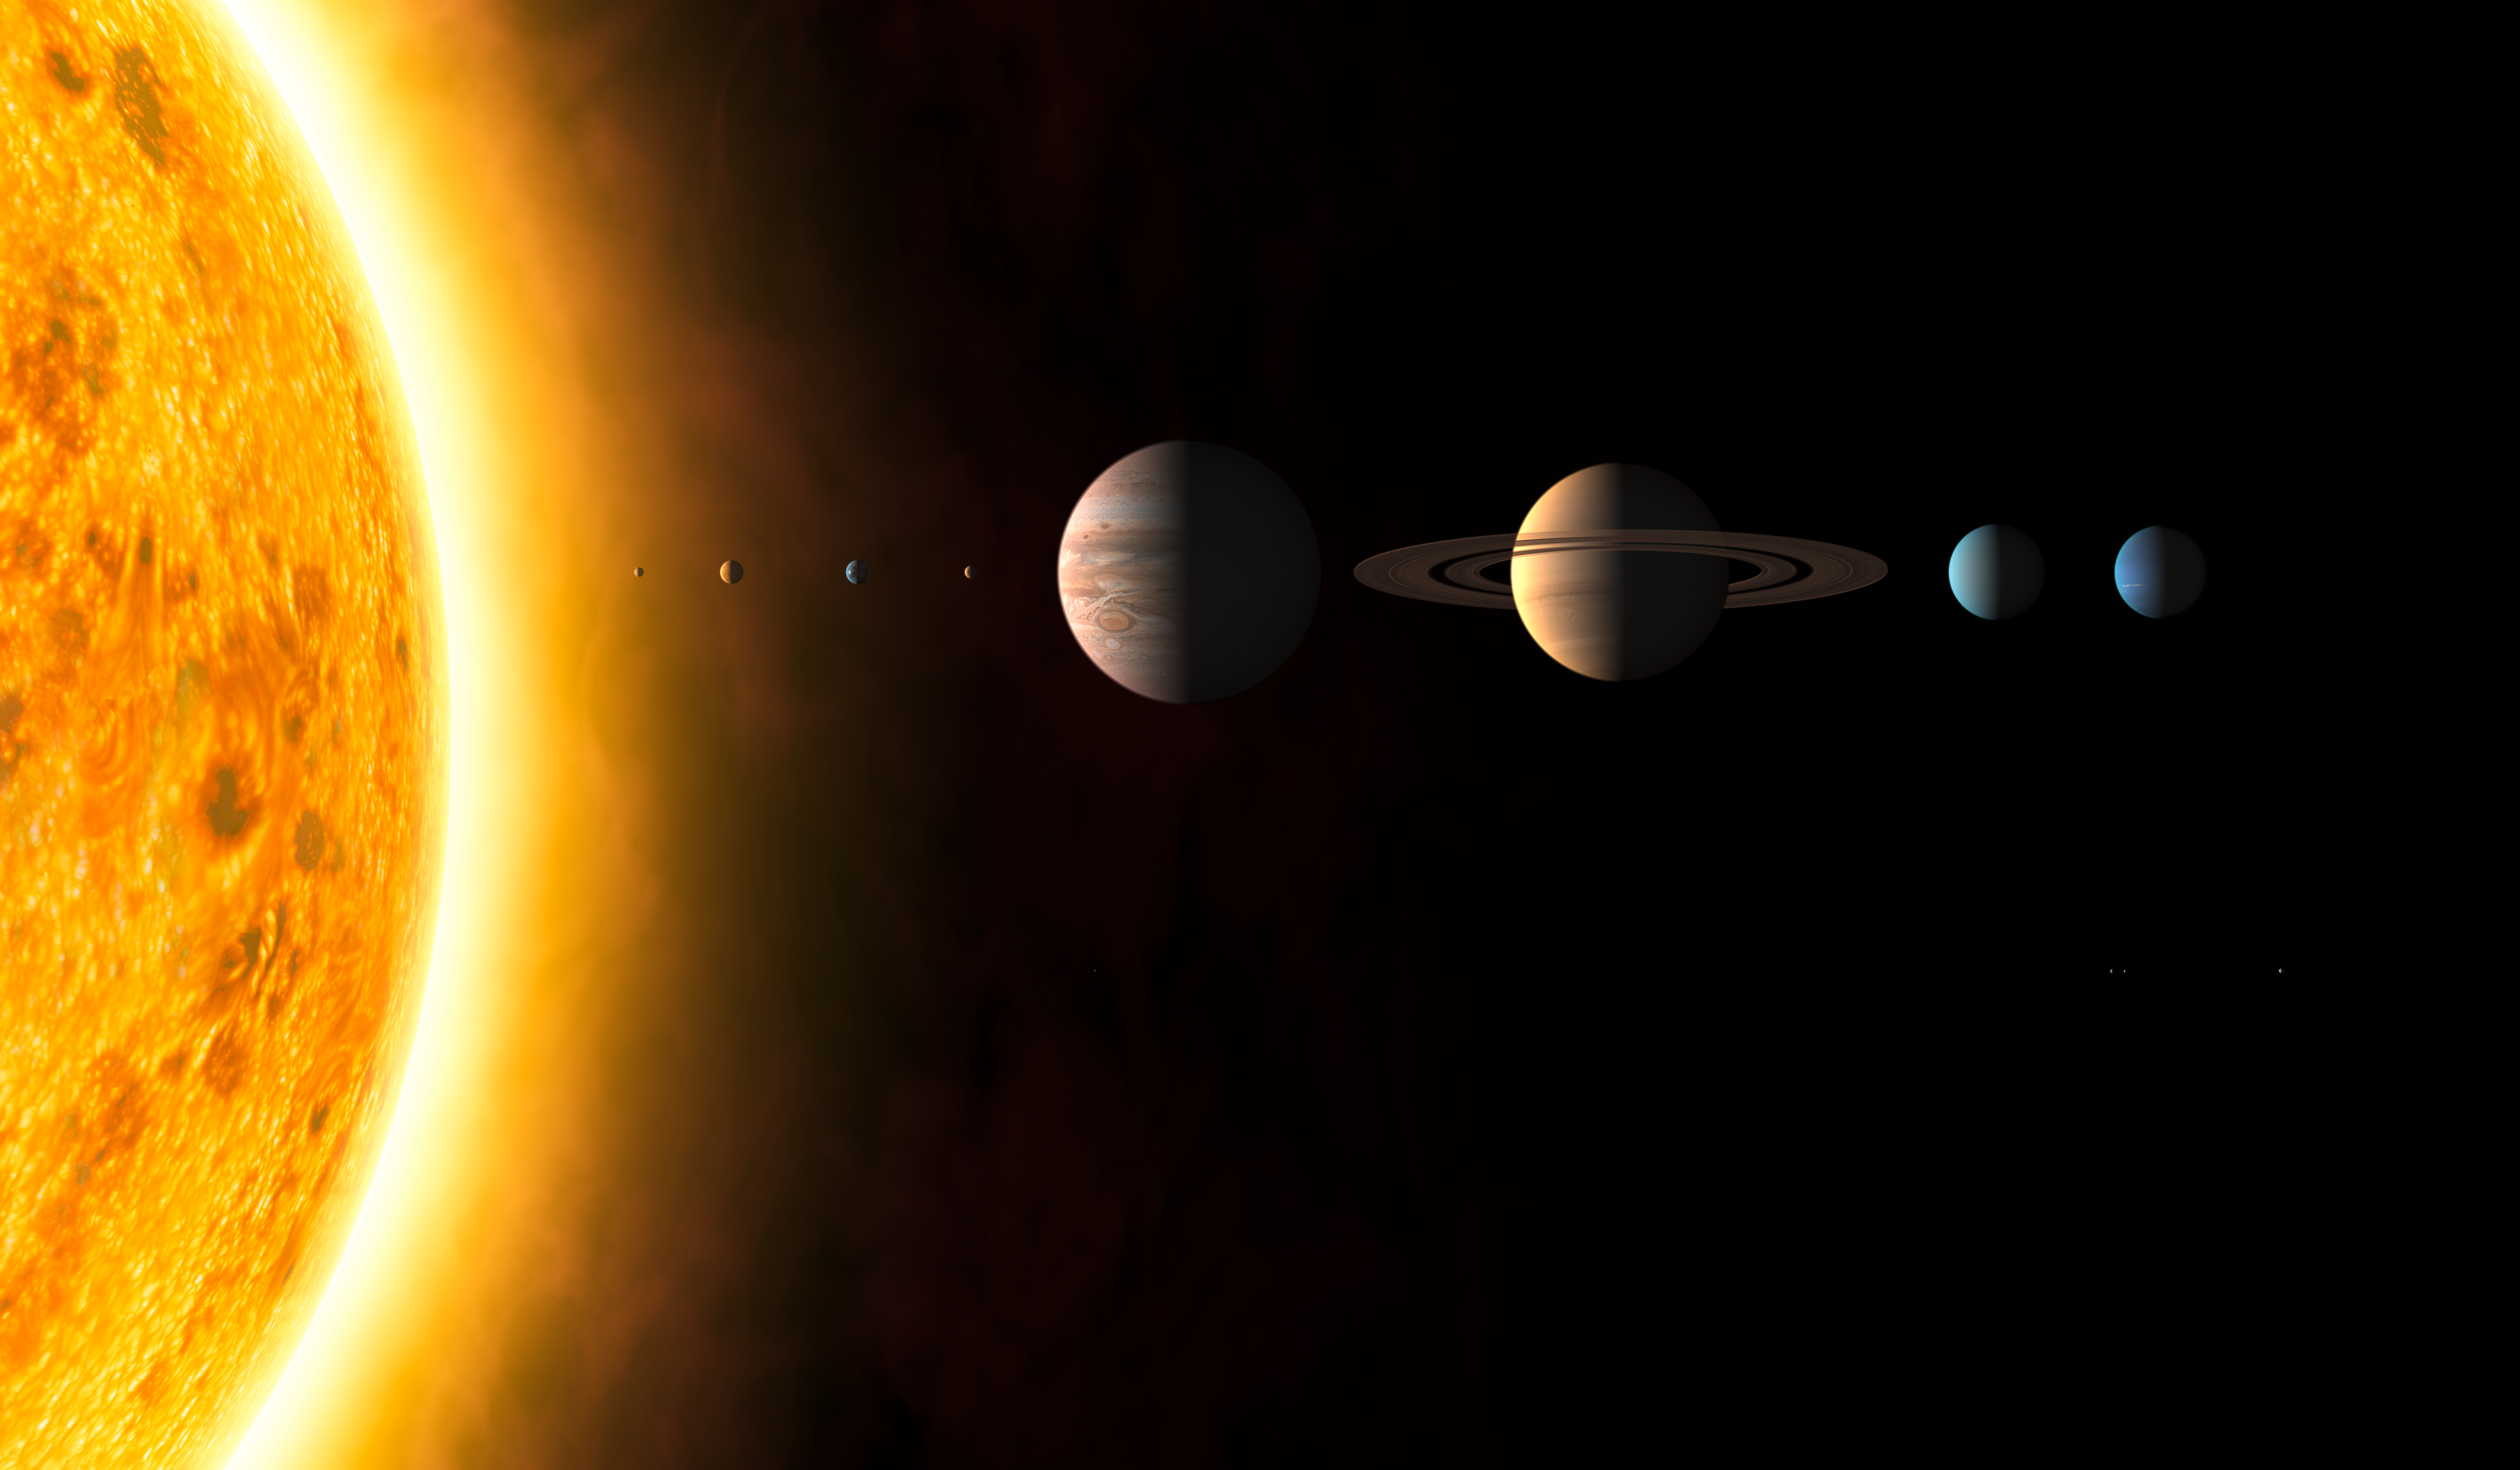

Solar System (artist's impression)

This image shows an artist's impression of the Solar System

Credit: The International Astronomical Union/Martin Kornmesser